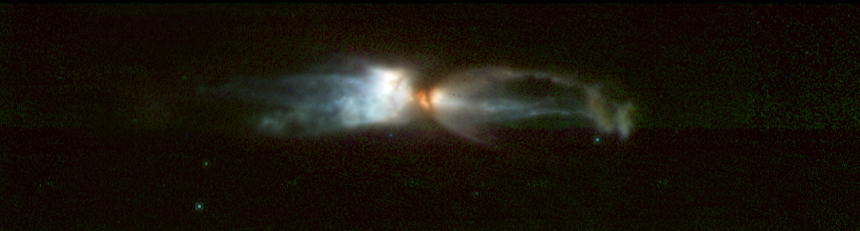

The 'Rotten Egg' nebula - a planetary nebula in the making

This is a composite of four images taken with different NICMOS infrared filters on March 28, 1998. It shows that the physical properties of the material, both composition and temperature, vary significantly throughout the outflowing material.

Credit: NASA, ESA, William B. Latter (SIRTF Science Center/California Institute of Technology), John H. Bieging (University of Arizona), Casey Meakin (University of Arizona), A.G.G.M. Tielens (Kapteyn Astronomical Institute), Aditya Dayal (IPAC/NASA Jet Propulsion Laboratory), Joseph L. Hora (Center for Astrophysics), and DouglasM. Kelly (University of Arizona)